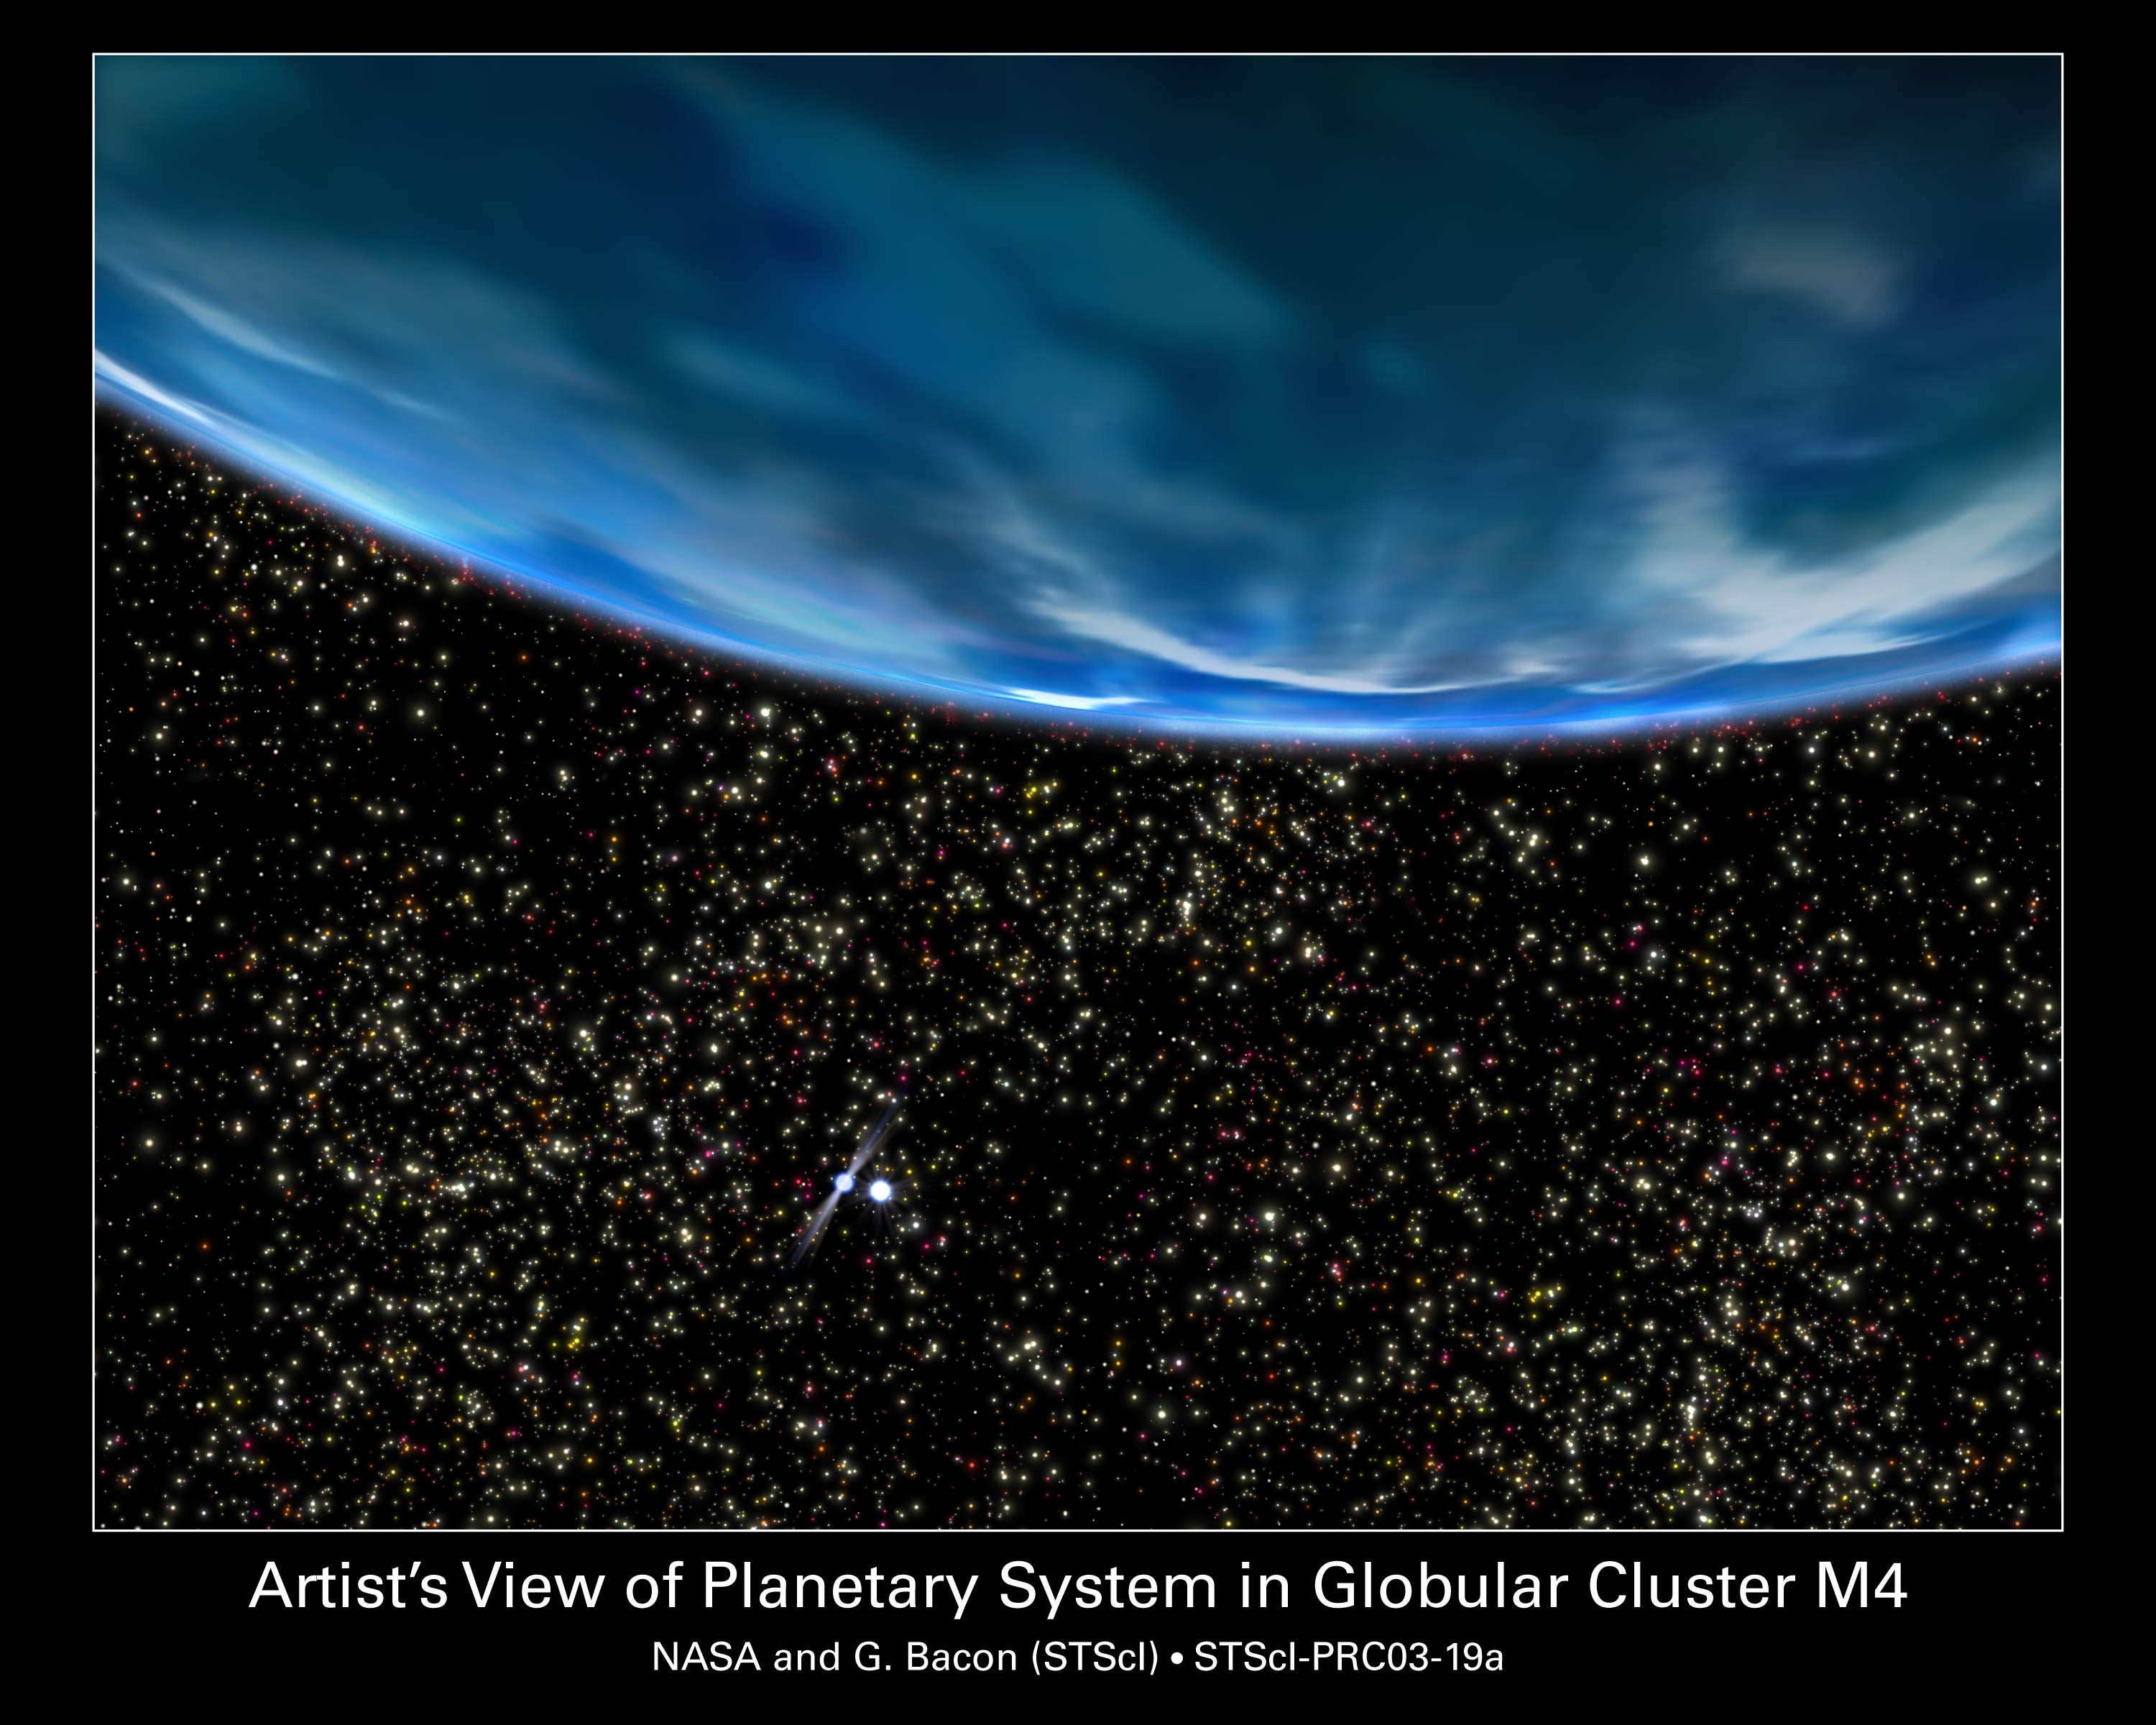

Ancient Planet in a Globular Cluster Core (artist's impression)

A rich starry sky fills the view from an ancient gas-giant planet in the core of the globular star cluster M4, as imagined in this artist's concept. The 13-billion-year-old planet orbits a helium white-dwarf star and the millisecond pulsar B1620-26, seen at lower left. The globular cluster is deficient in heavier elements for making planets, so the existence of such a world implies that planet formation may have been quite efficient and common in the early universe.

Credit: NASA/ESA and G. Bacon (STScI)